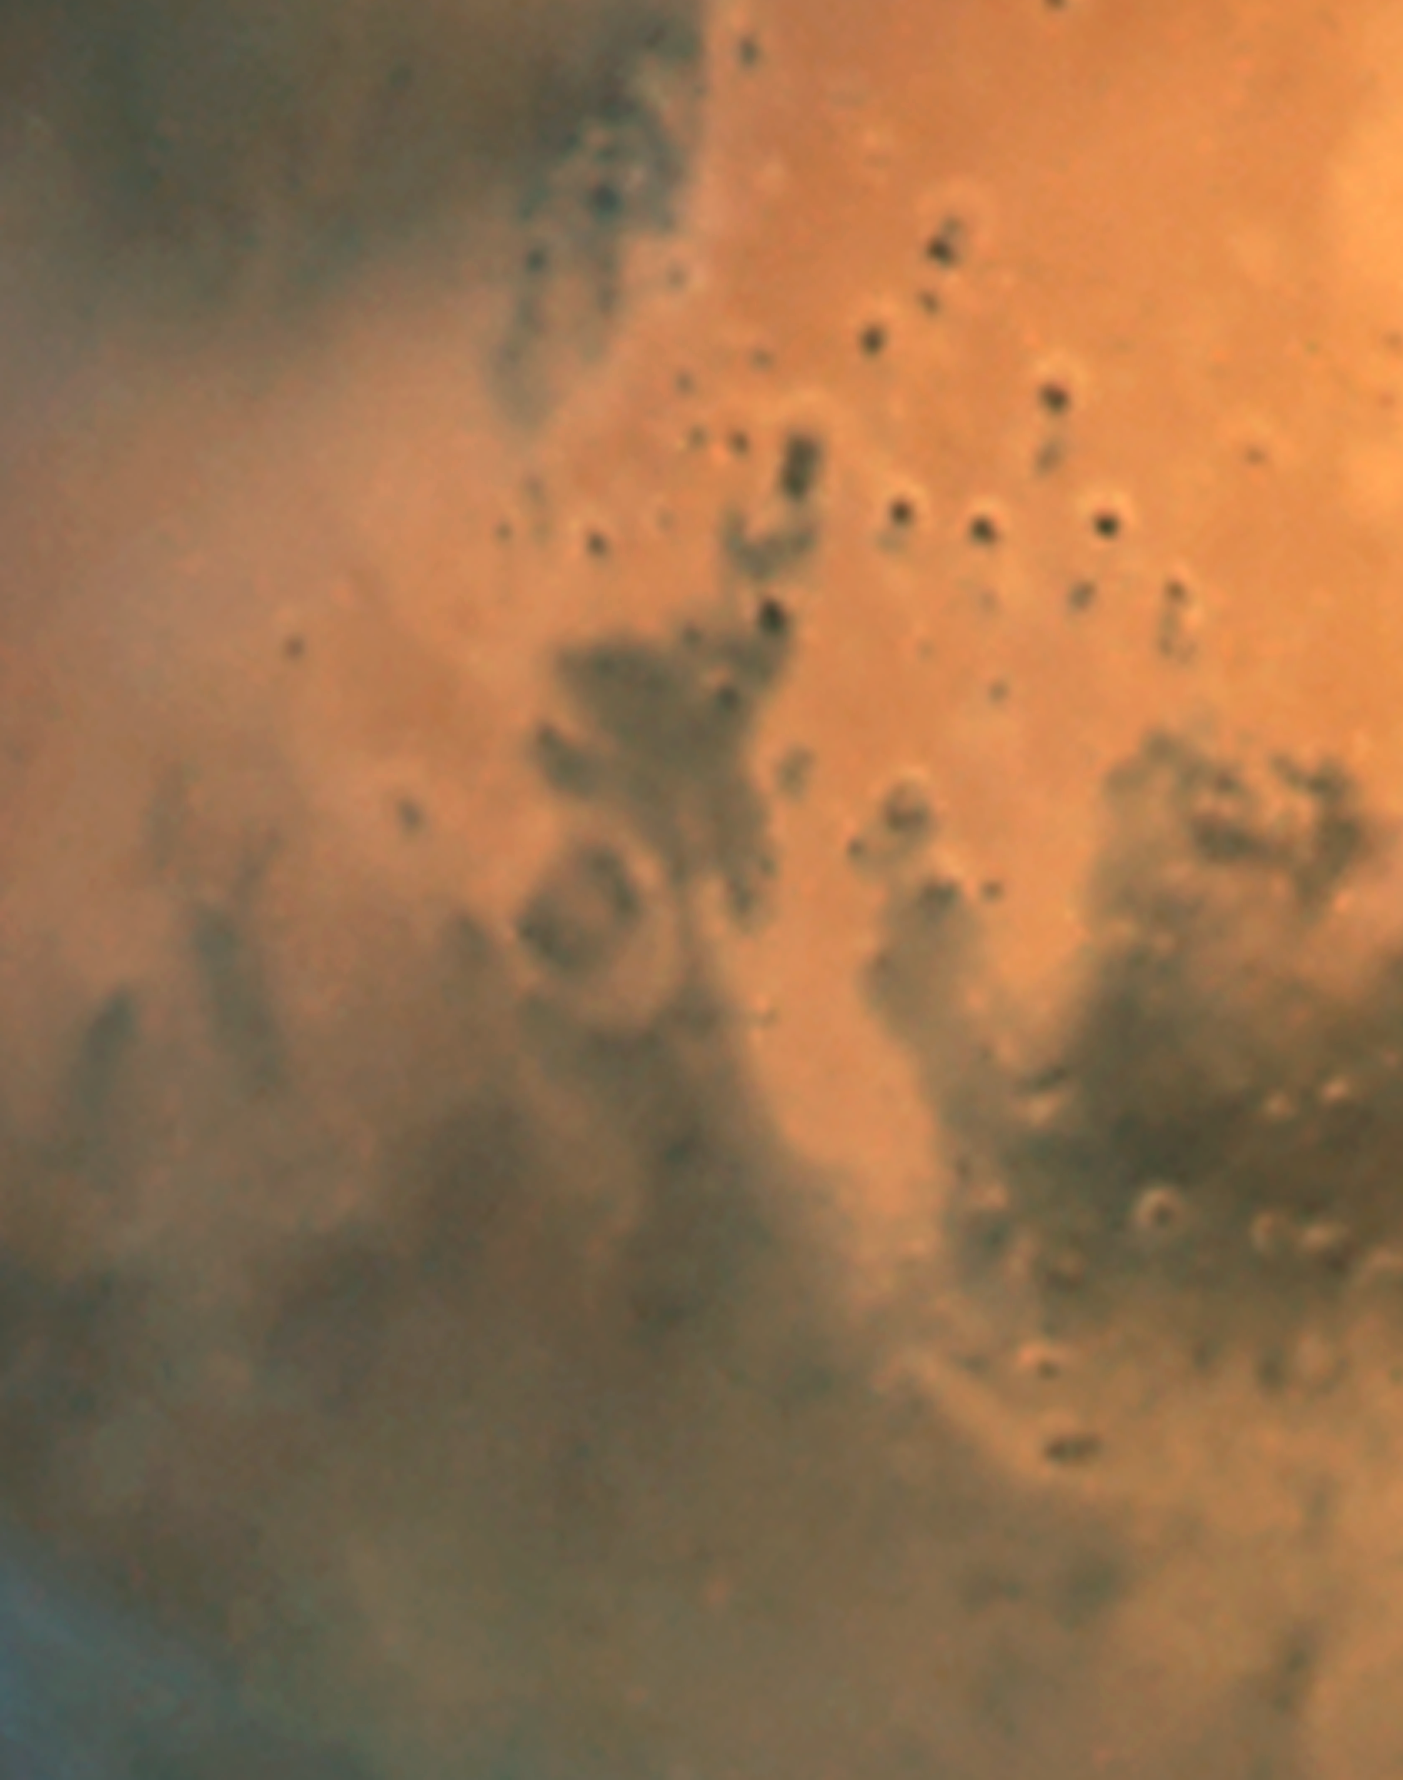

Mars dust storm: June 26, 2001 (WFPC2, unannotated)

Hubble images of the Sinus Meridiani region taken on October 28, 2005 show evidence of a regional dust storm. A comparable Hubble image taken on June 26, 2001 of the same region shows a storm-free environment. The dust storm, which is about 930 miles (1500 km) long, is about the size of the states of Texas, Oklahoma, and New Mexico combined. Ground-based amateur telescopes have been watching the storm grow and evolve.

Credit: NASA, ESA, The Hubble Heritage Team (STScI/AURA), J. Bell (Cornell University) and M. Wolff (Space Science Institute)